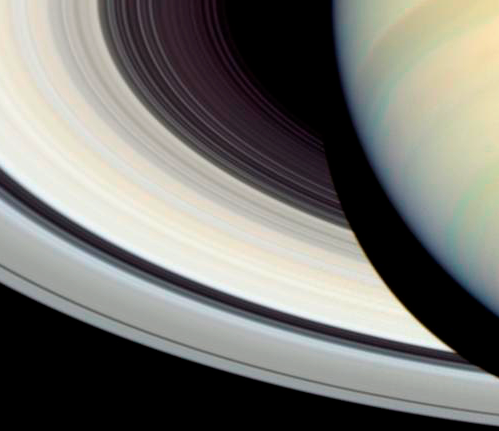

Detail of Saturn's Rings, Disk and Shadow

Hubble still offers detailed images of Saturn, which are comparable to those provided by Cassini.

Credit: NASA, ESA and E. Karkoschka (University of Arizona)